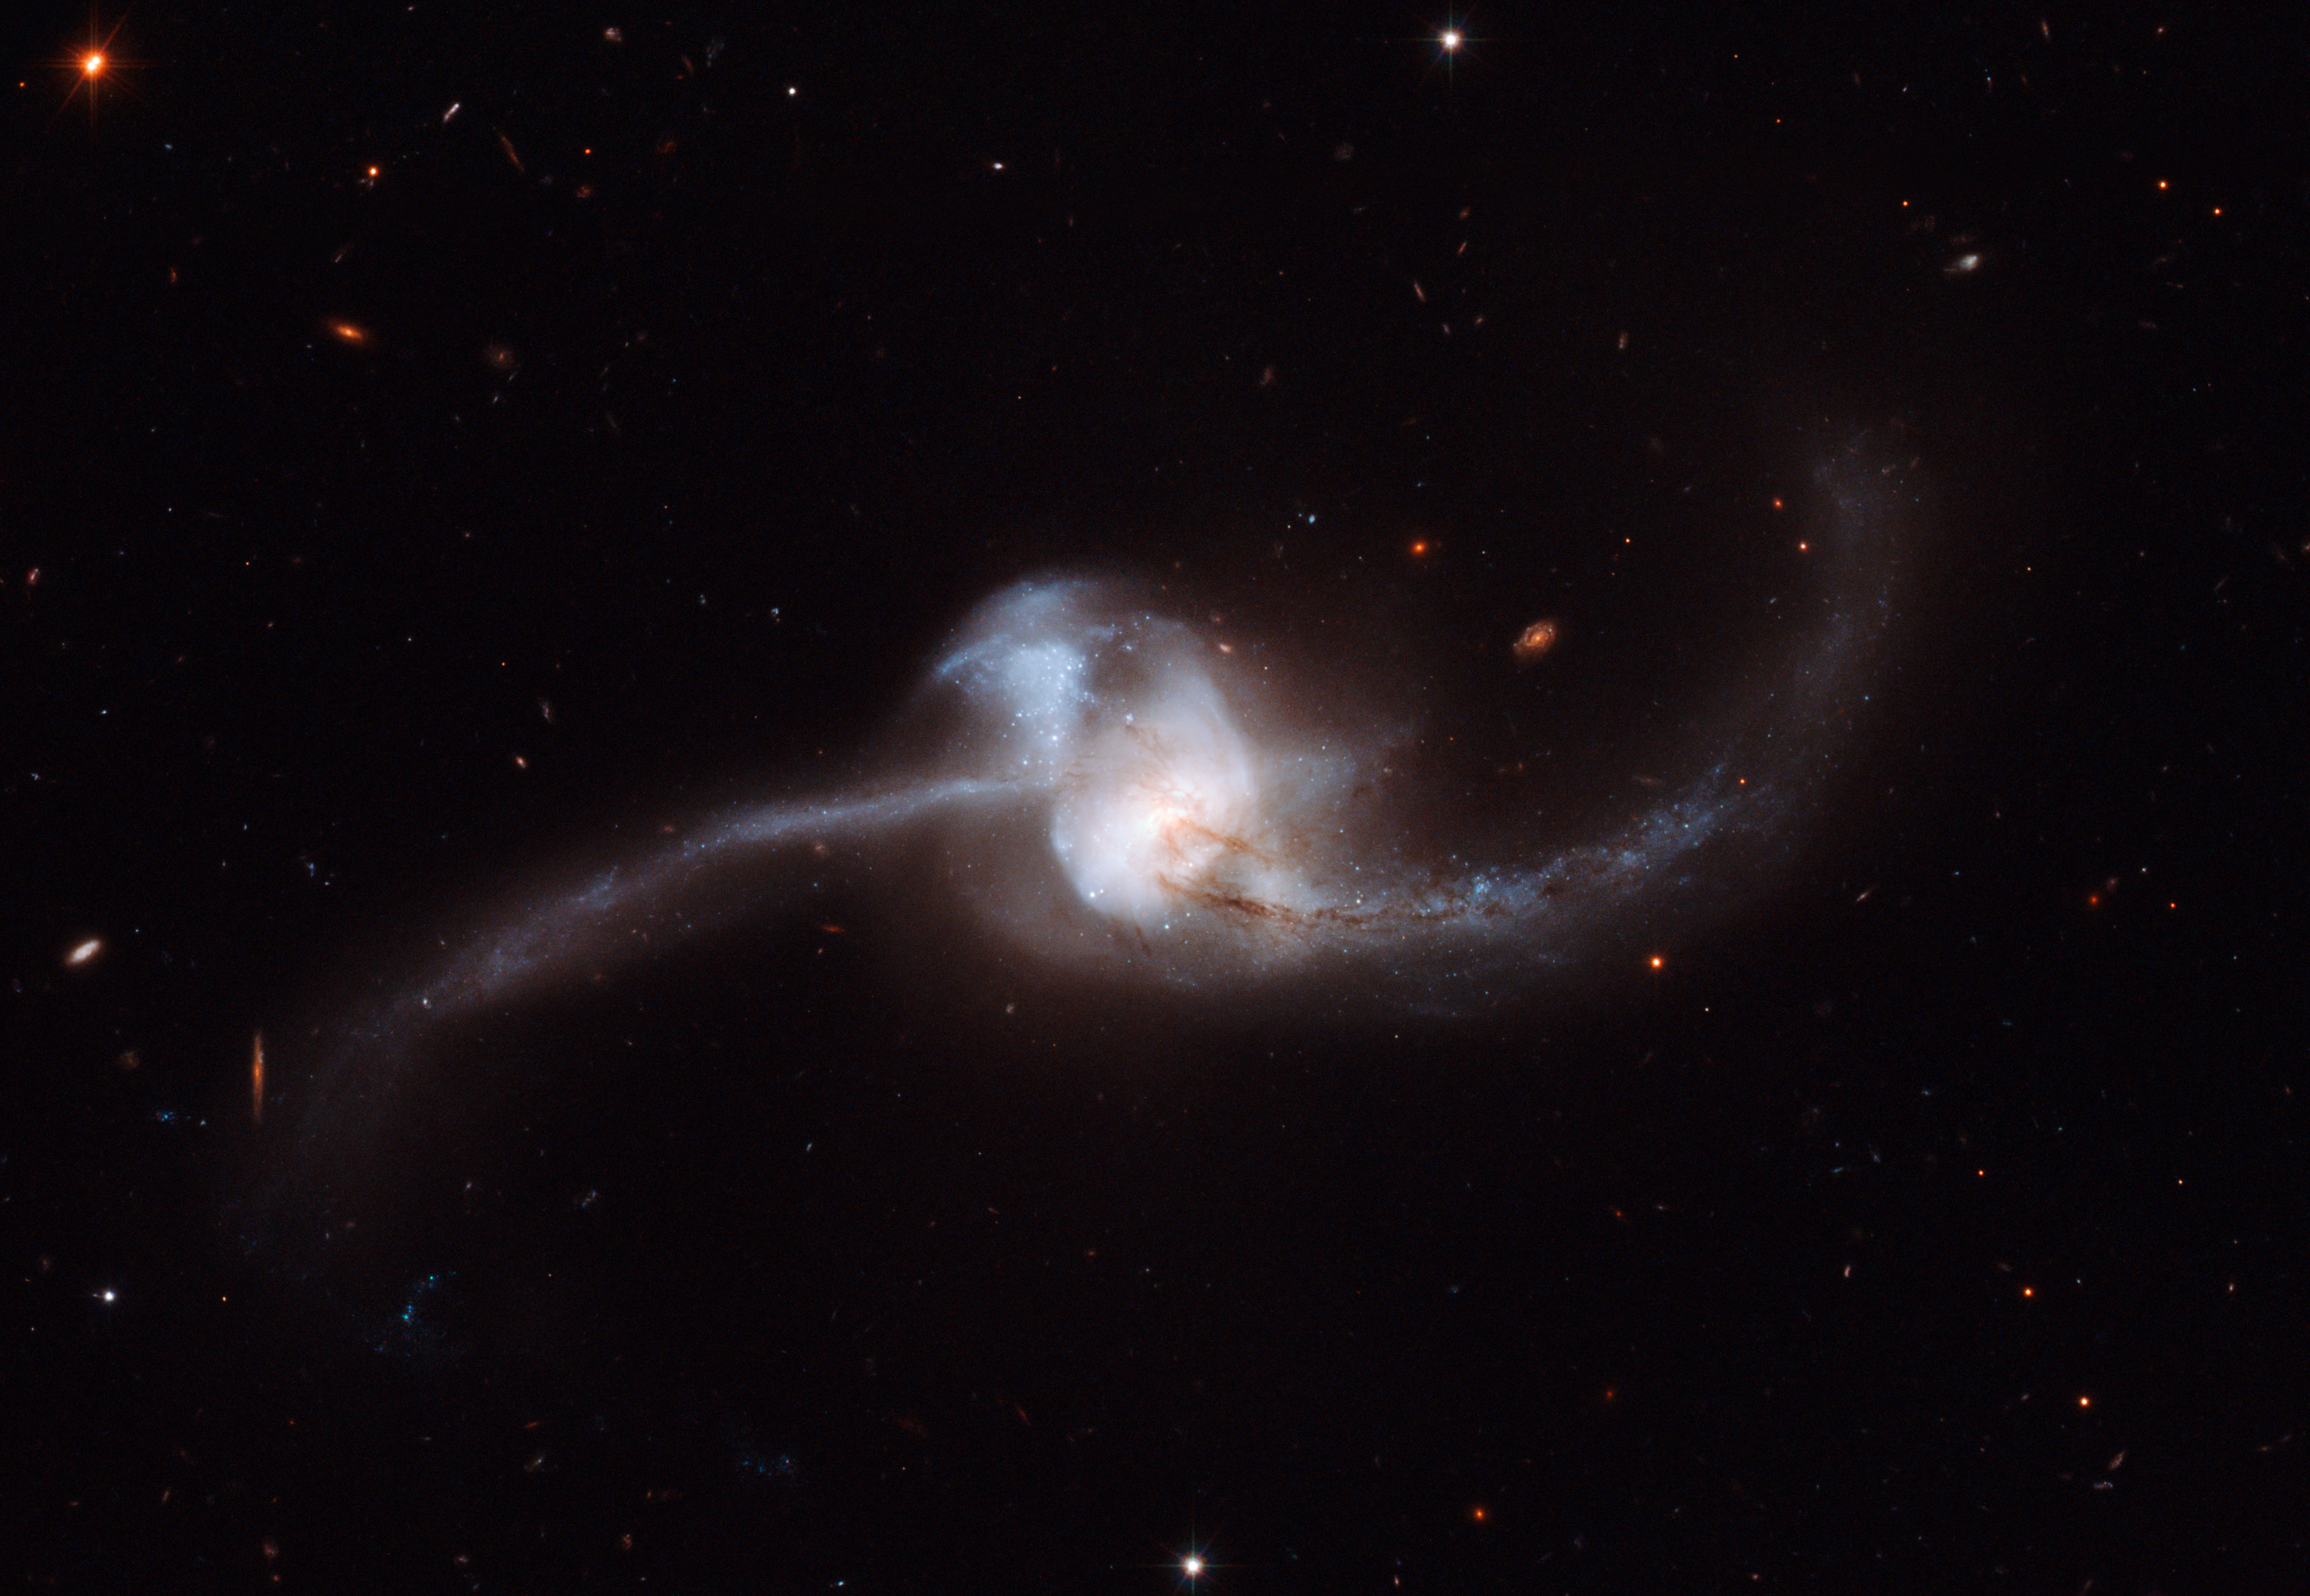

Hubble views results of NGC 2623 merger

Not surprisingly, interacting galaxies have a dramatic effect on each other. Studies have revealed that as galaxies approach one another massive amounts of gas are pulled from each galaxy towards the centre of the other, until ultimately, the two merge into one massive galaxy. NGC 2623 is in the late stages of the merging process, with the centres of the original galaxy pair now merged into one nucleus, but stretching out from the centre are two tidal tails of young stars, a strong indicator that a merger has taken place. During such a collision, the dramatic exchange of mass and gases initiates star formation, seen here in both the tails.

The prominent lower tail is richly populated with bright star clusters — 100 of them have been found in these observations. These star clusters may have formed as part of a loop of stretched material associated with the northern tail, or they may have formed from debris falling back onto the nucleus. In addition to this active star-forming region, both galactic arms harbour very young stars in the early stages of their evolutionary journey.

Credit: NASA, ESA and A. Evans (Stony Brook University, New York, University of Virginia & National Radio Astronomy Observatory, Charlottesville, USA)